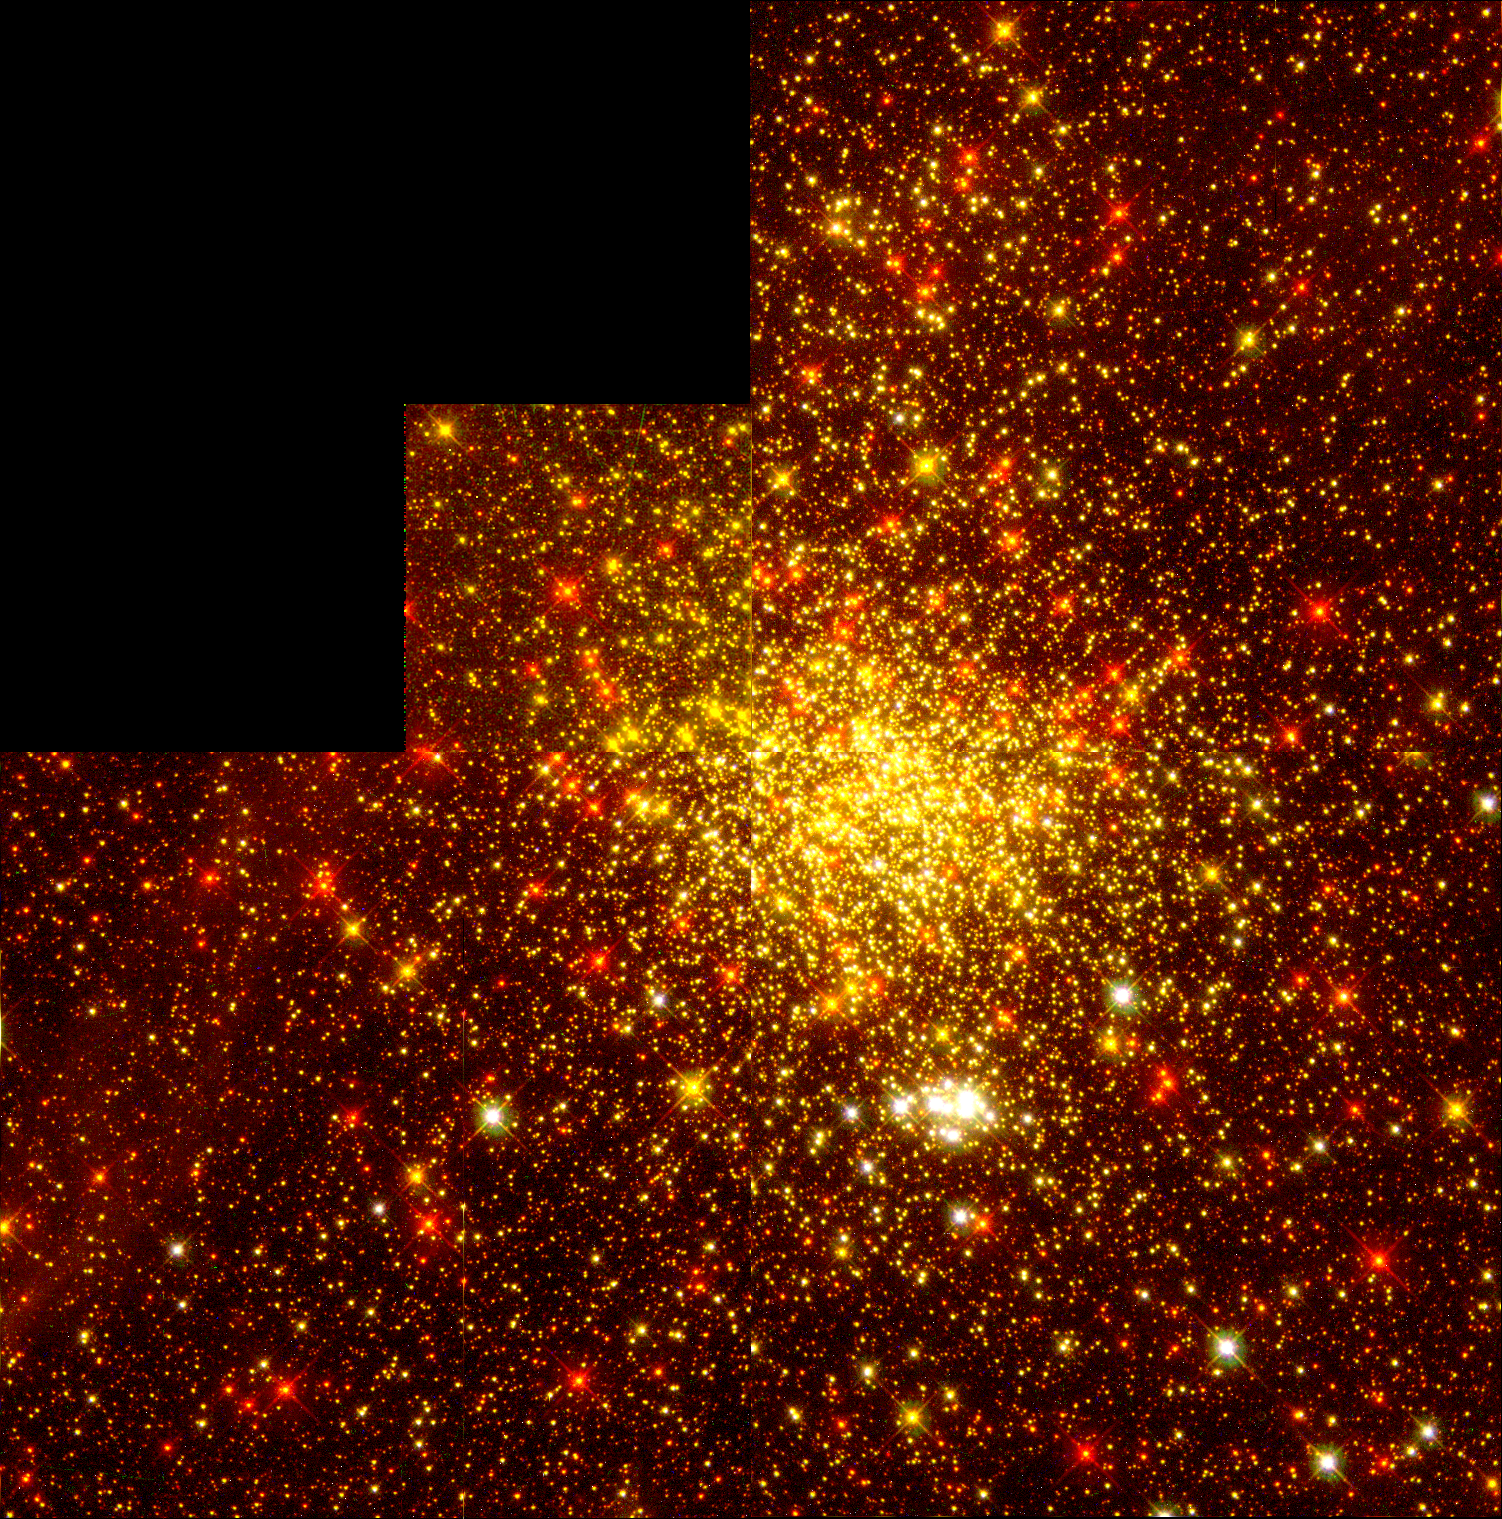

Starbirth in the Early Universe

This Hubble Space Telescope (HST) image shows rich detail, previously only seen in neighboring star birth regions, in a pair of star clusters 166,000 light-years away in the Large Magellanic Cloud (LMC), in the southern constellation Doradus. The field of view is 130 light-years across and was taken with the Wide Field Planetary Camera 2.

Credit: R. Gilmozzi, Space Telescope Science Institute/European Space Agency;Shawn Ewald, JPL; and NASA